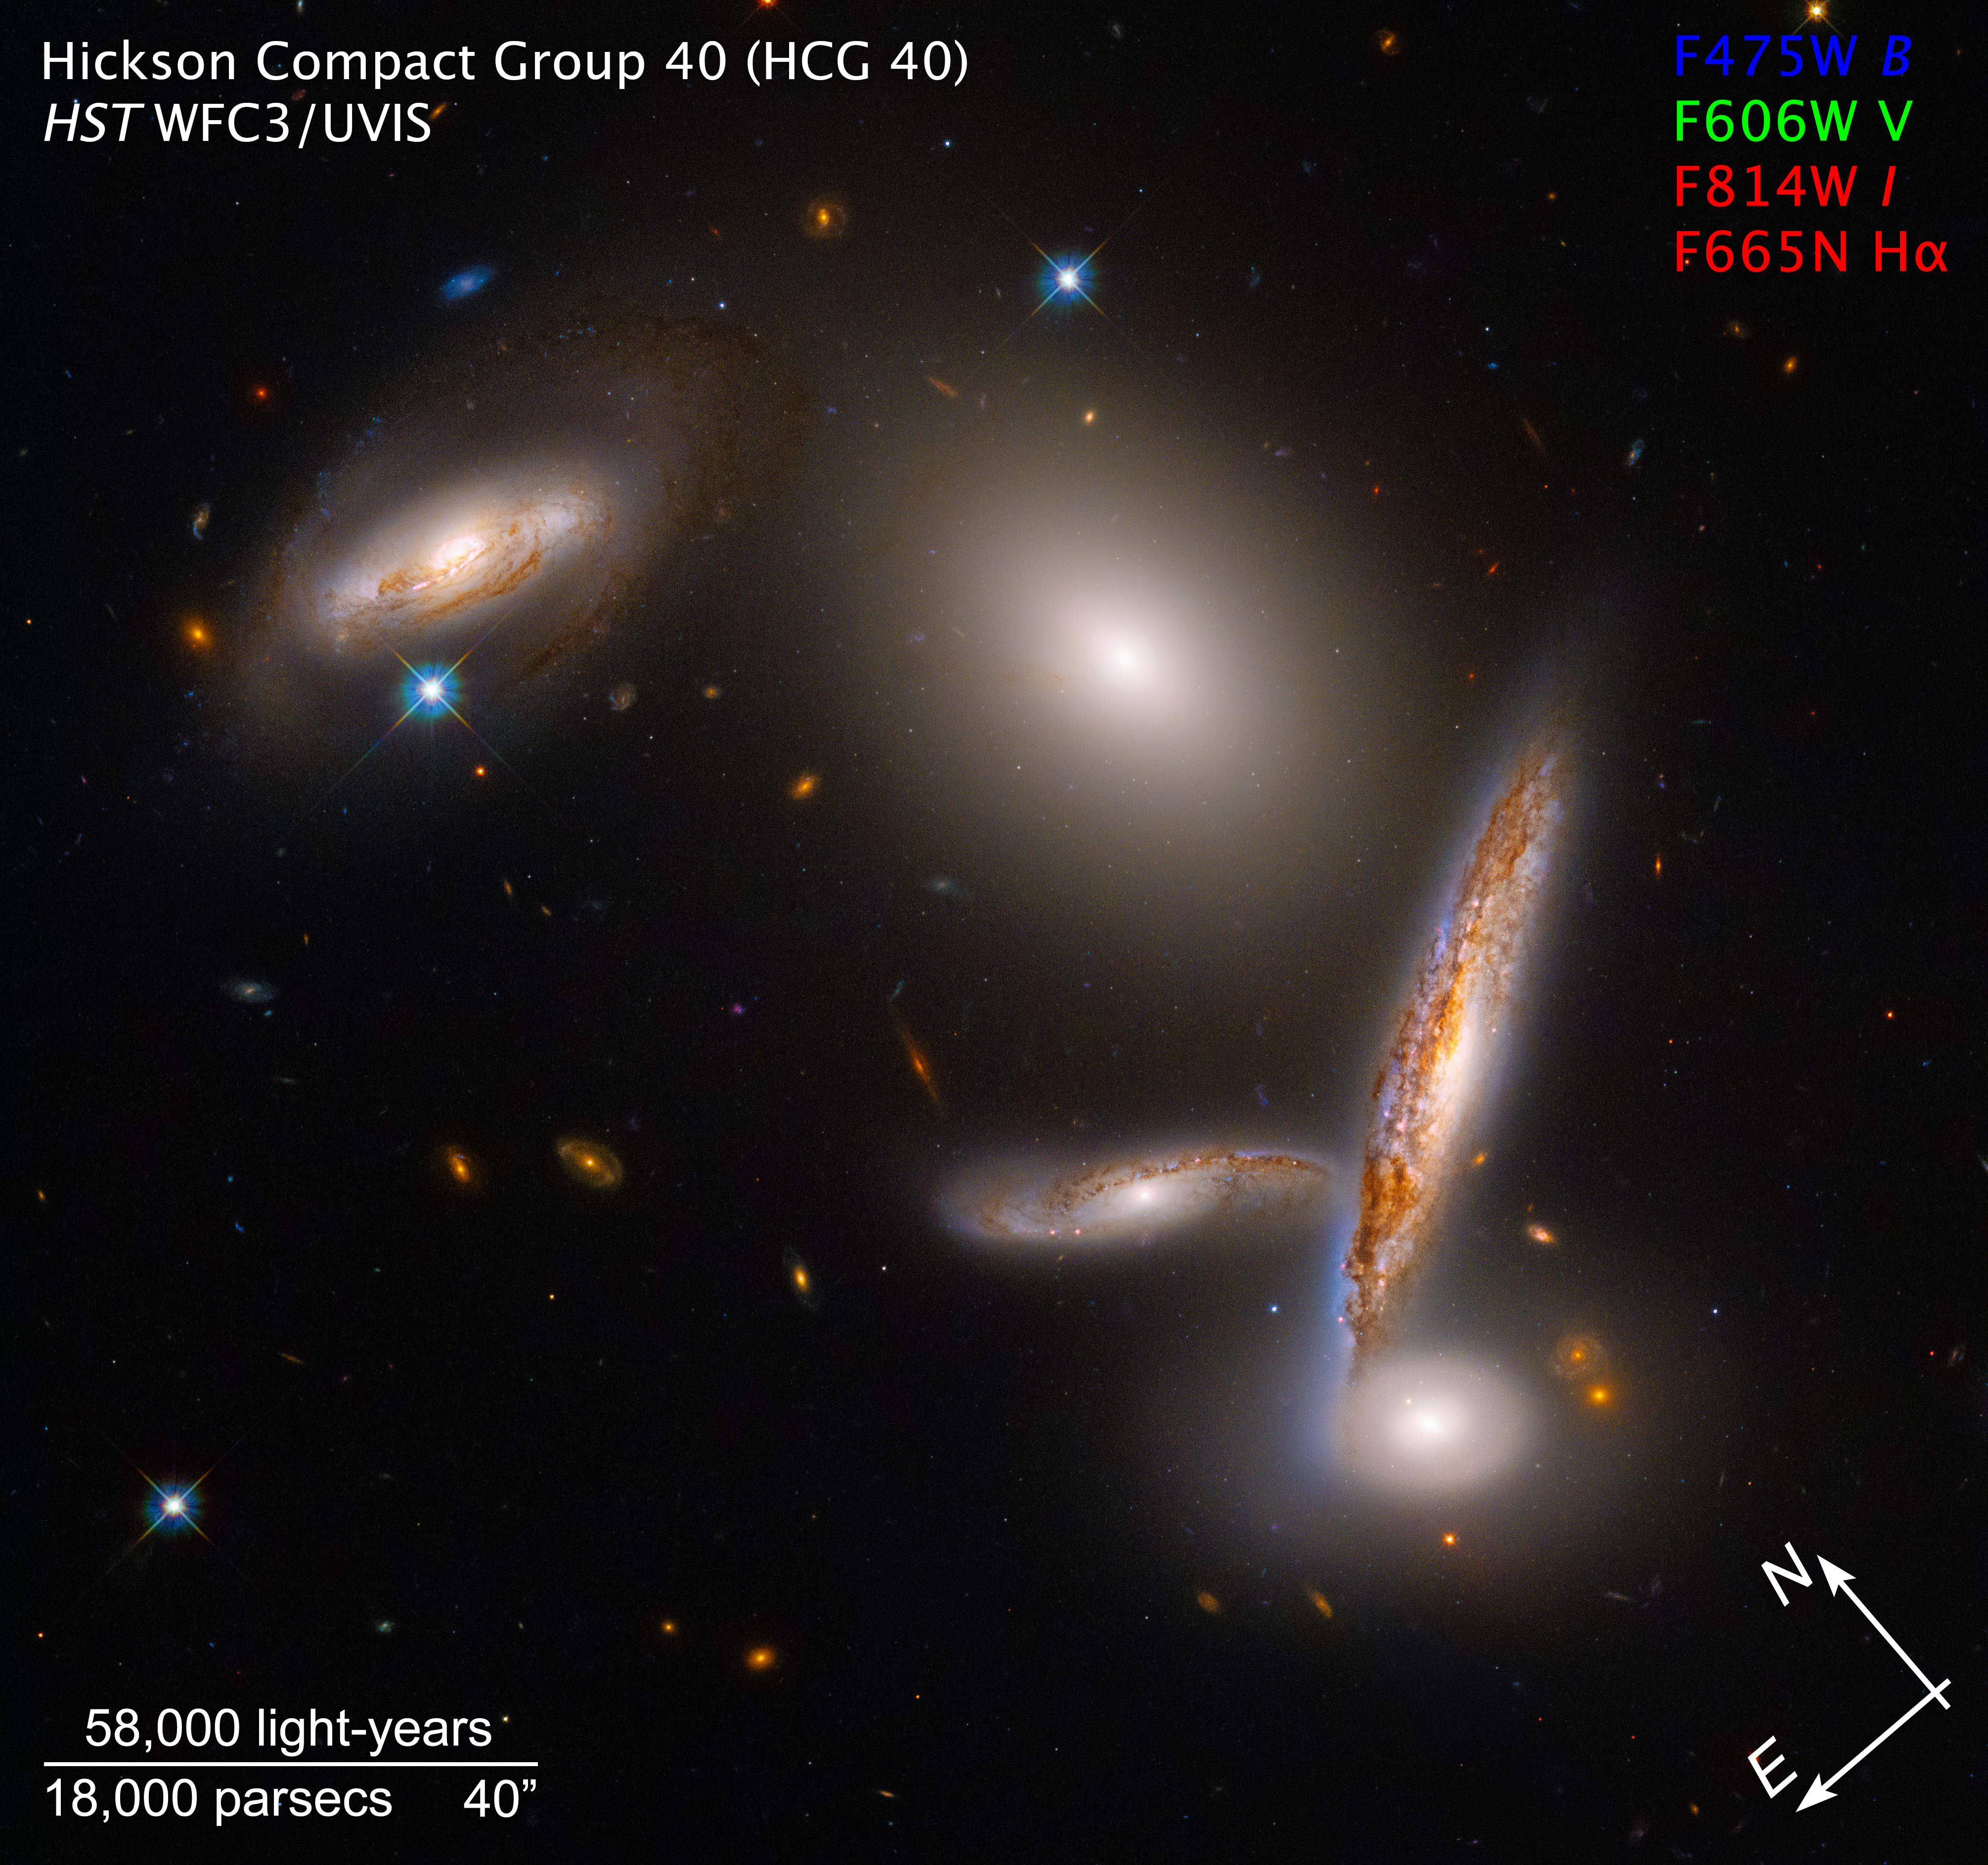

The Hickson Compact Group 40 - Annotated

The NASA/ESA Hubble Space Telescope is celebrating its 32nd birthday with a stunning look at an unusual close-knit collection of five galaxies, called the Hickson Compact Group 40. This snapshot reflects a special moment in their lifetimes as they fall together before they merge.

Credit: NASA, ESA and STScI